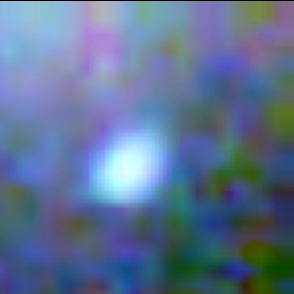

Galaxy building blocks

This is one Proto Galaxy out of a series of 18, taken by the Wide Field Planetary Camera 2.

Credit: Rogier Windhorst and Sam Pascarelle (Arizona State University) and NASA/ESA